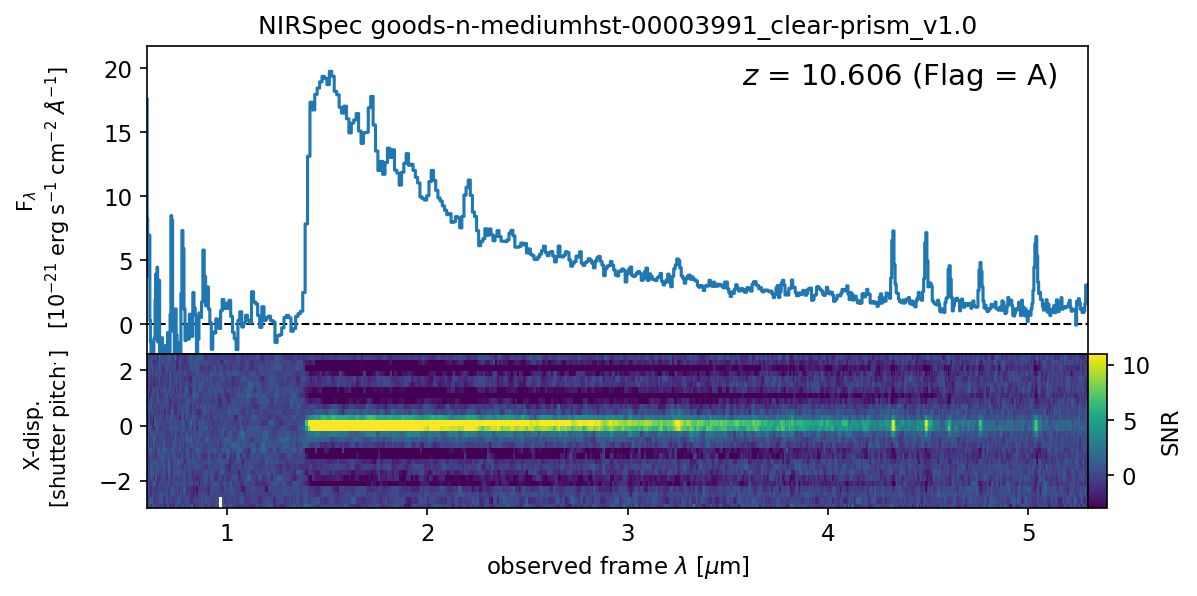

Preview image from MAST of one of the NIRSpec/MSA spectra of GN-z11

This image shows a preview from MAST of one of the NIRSpec/MSA spectra of GN-z11.

Credit: D’Eugenio et al. (2024)